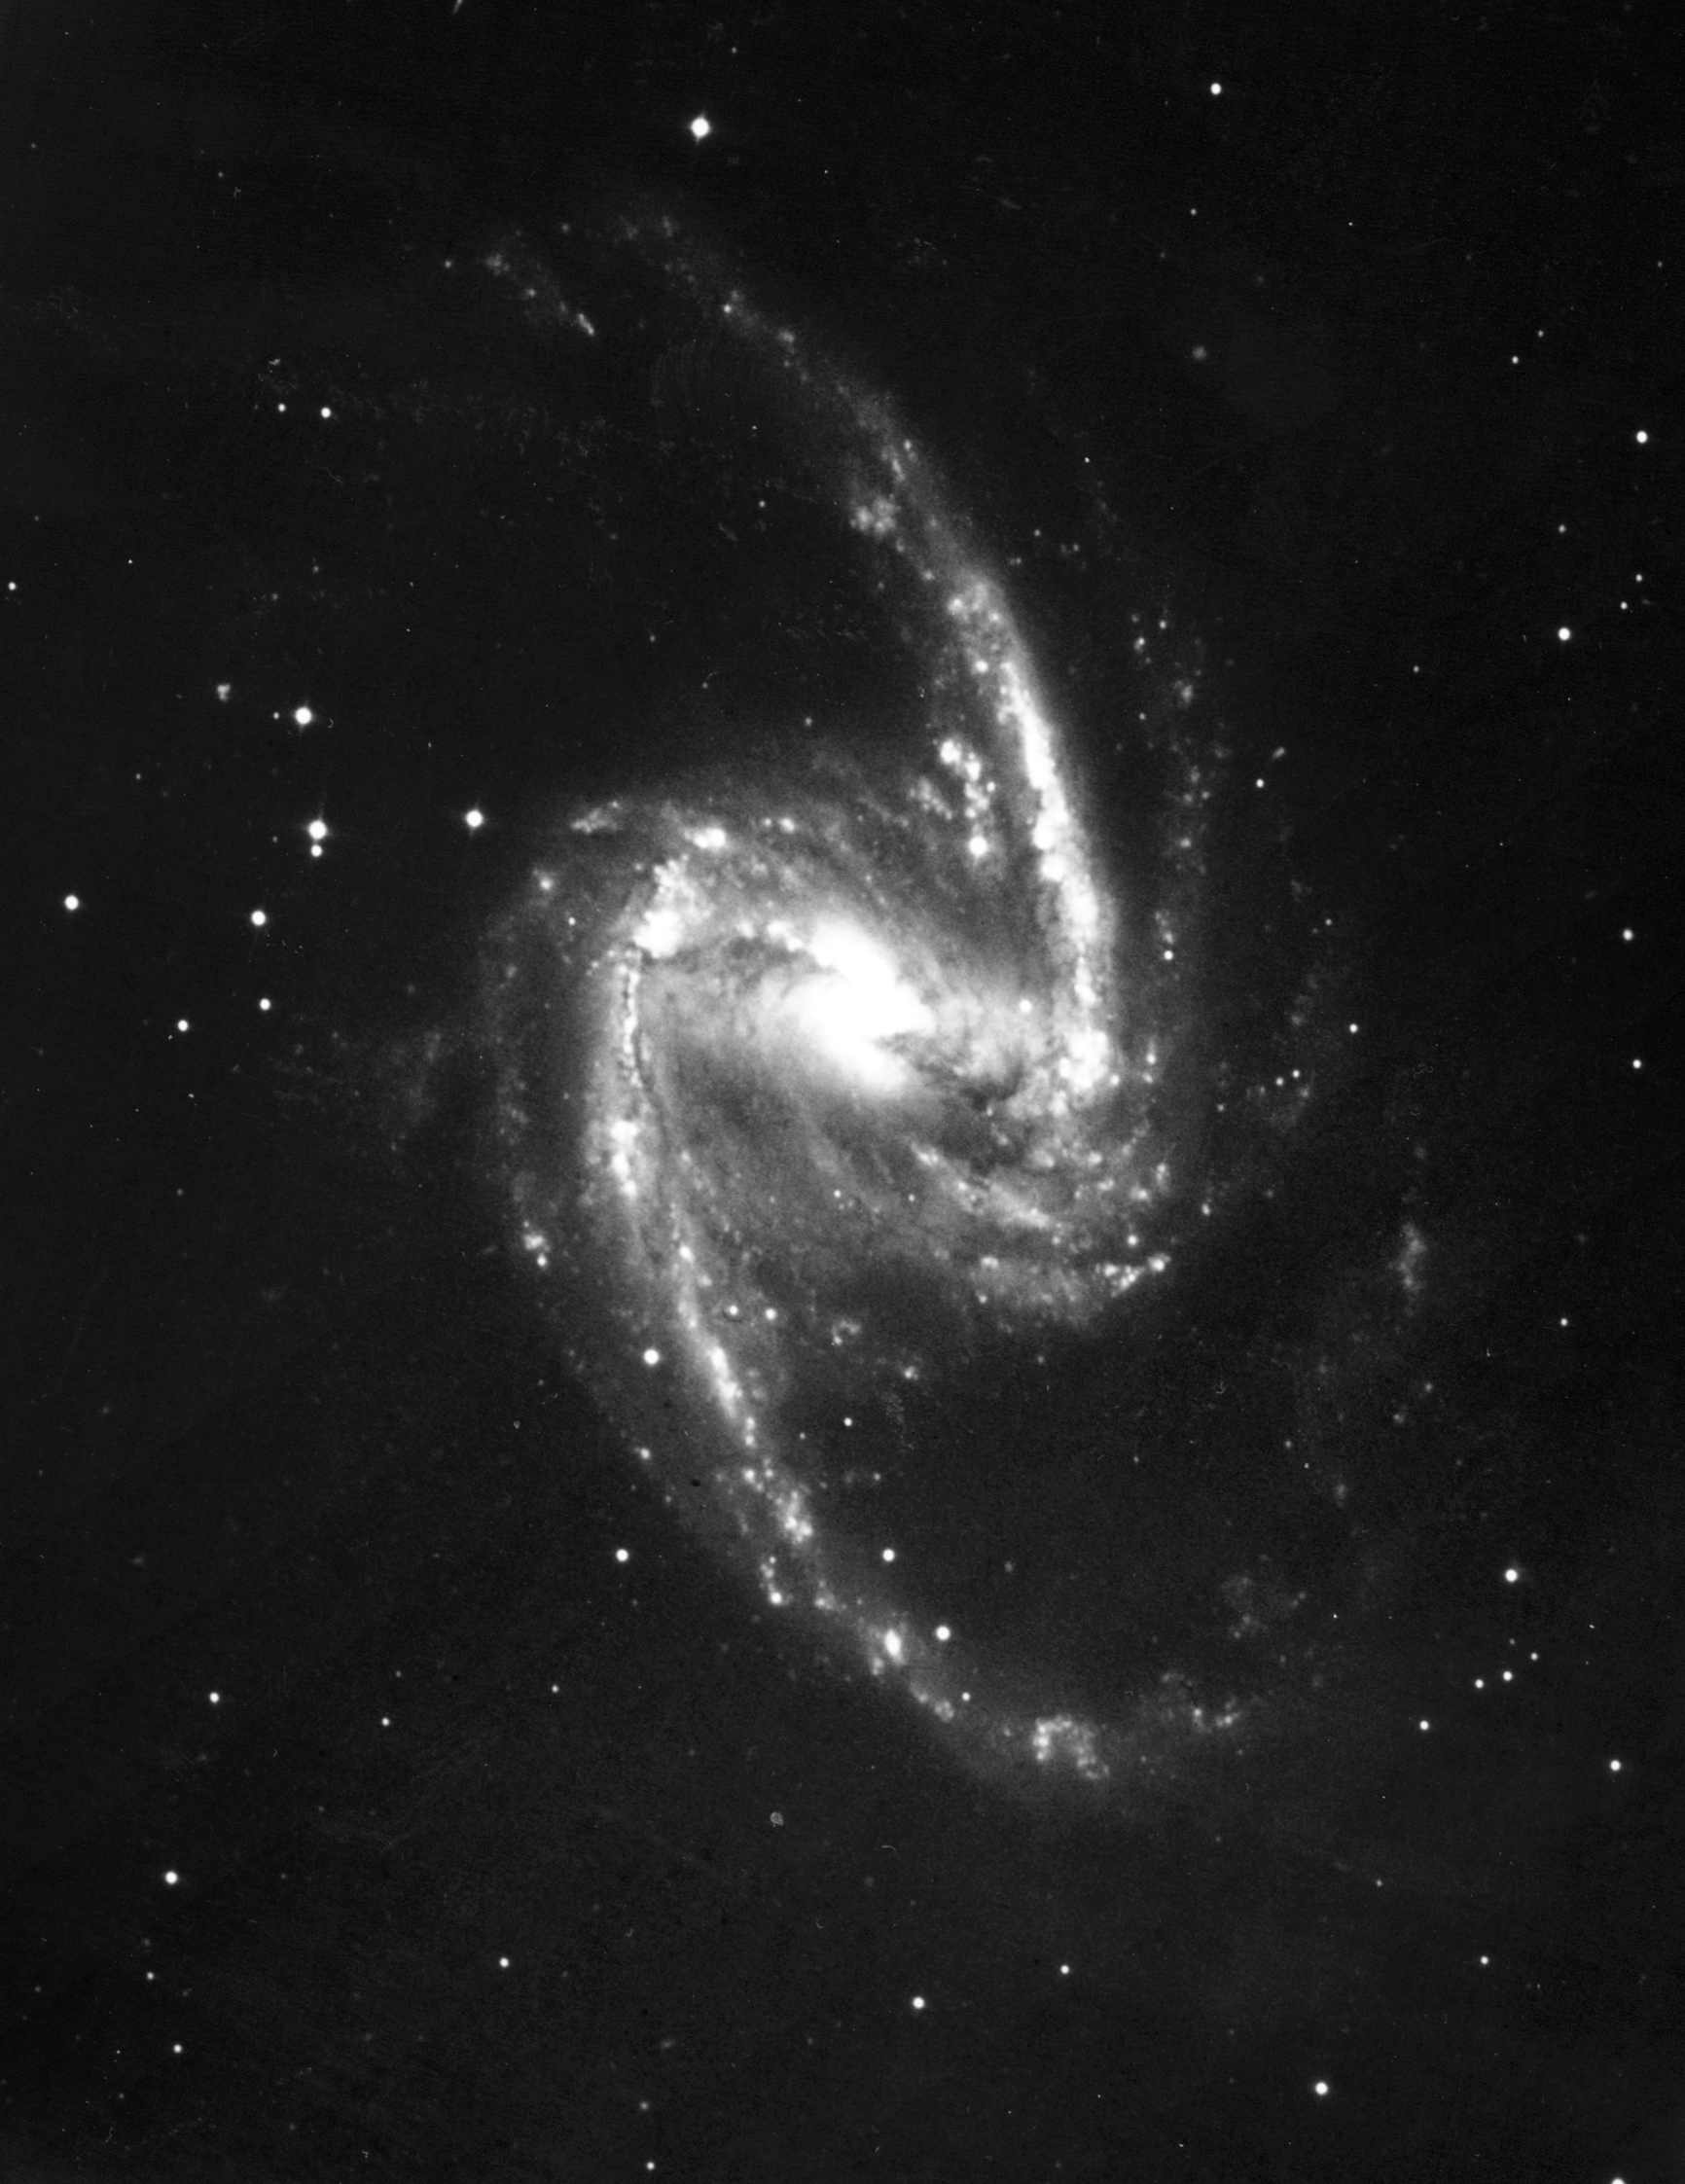

Starry bulges yield secrets to galaxy growth (ground-based image)

This image, taken by a ground-based telescope, displays the entire galaxy NGC 1365. But the telescope's resolution is not powerful enough to reveal the flurry of activity in the galaxy's hub.

Credit: Allan Sandage (The Observatories of the Carnegie Institution of Washington) and John Bedke (Computer Sciences Corporation and the Space Telescope Science Institute)